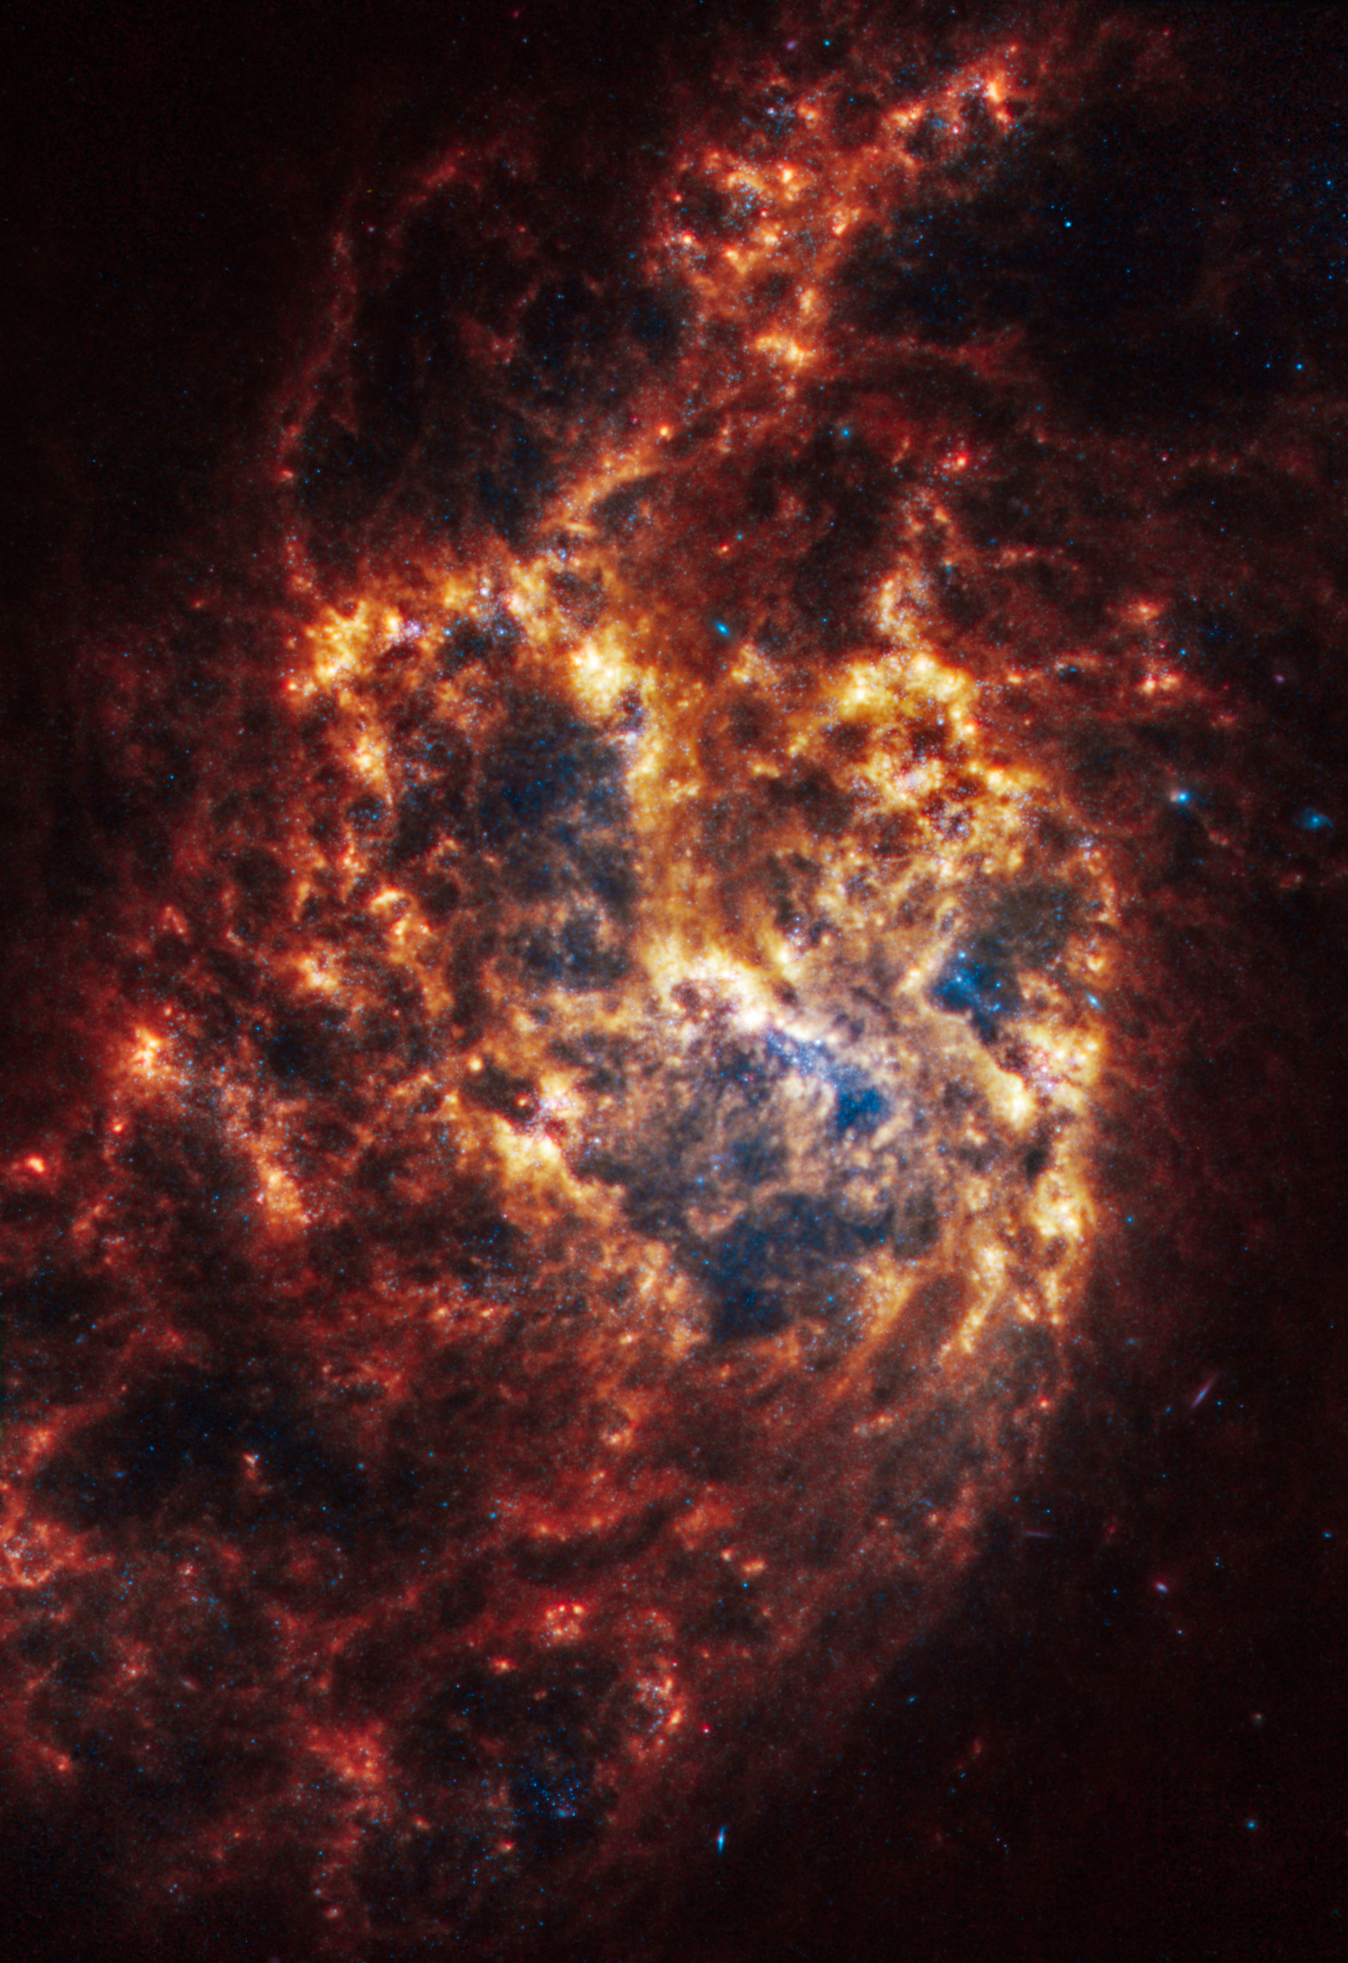

NGC 1385

This spiral galaxy was observed as part of the Physics at High Angular resolution in Nearby GalaxieS (PHANGS) program, a large project that includes observations from several space- and ground-based telescopes of many galaxies to help researchers study all phases of the star formation cycle, from the formation of stars within dusty gas clouds to the energy released in the process that creates the intricate structures revealed by Webb’s new images.

NGC 1385 is 30 million light-years away in the constellation Fornax.

Learn more about what can be seen in this vast collection of Webb images here.

Credit: NASA, ESA, CSA, STScI, J. Lee (STScI), T. Williams (Oxford), PHANGS Team